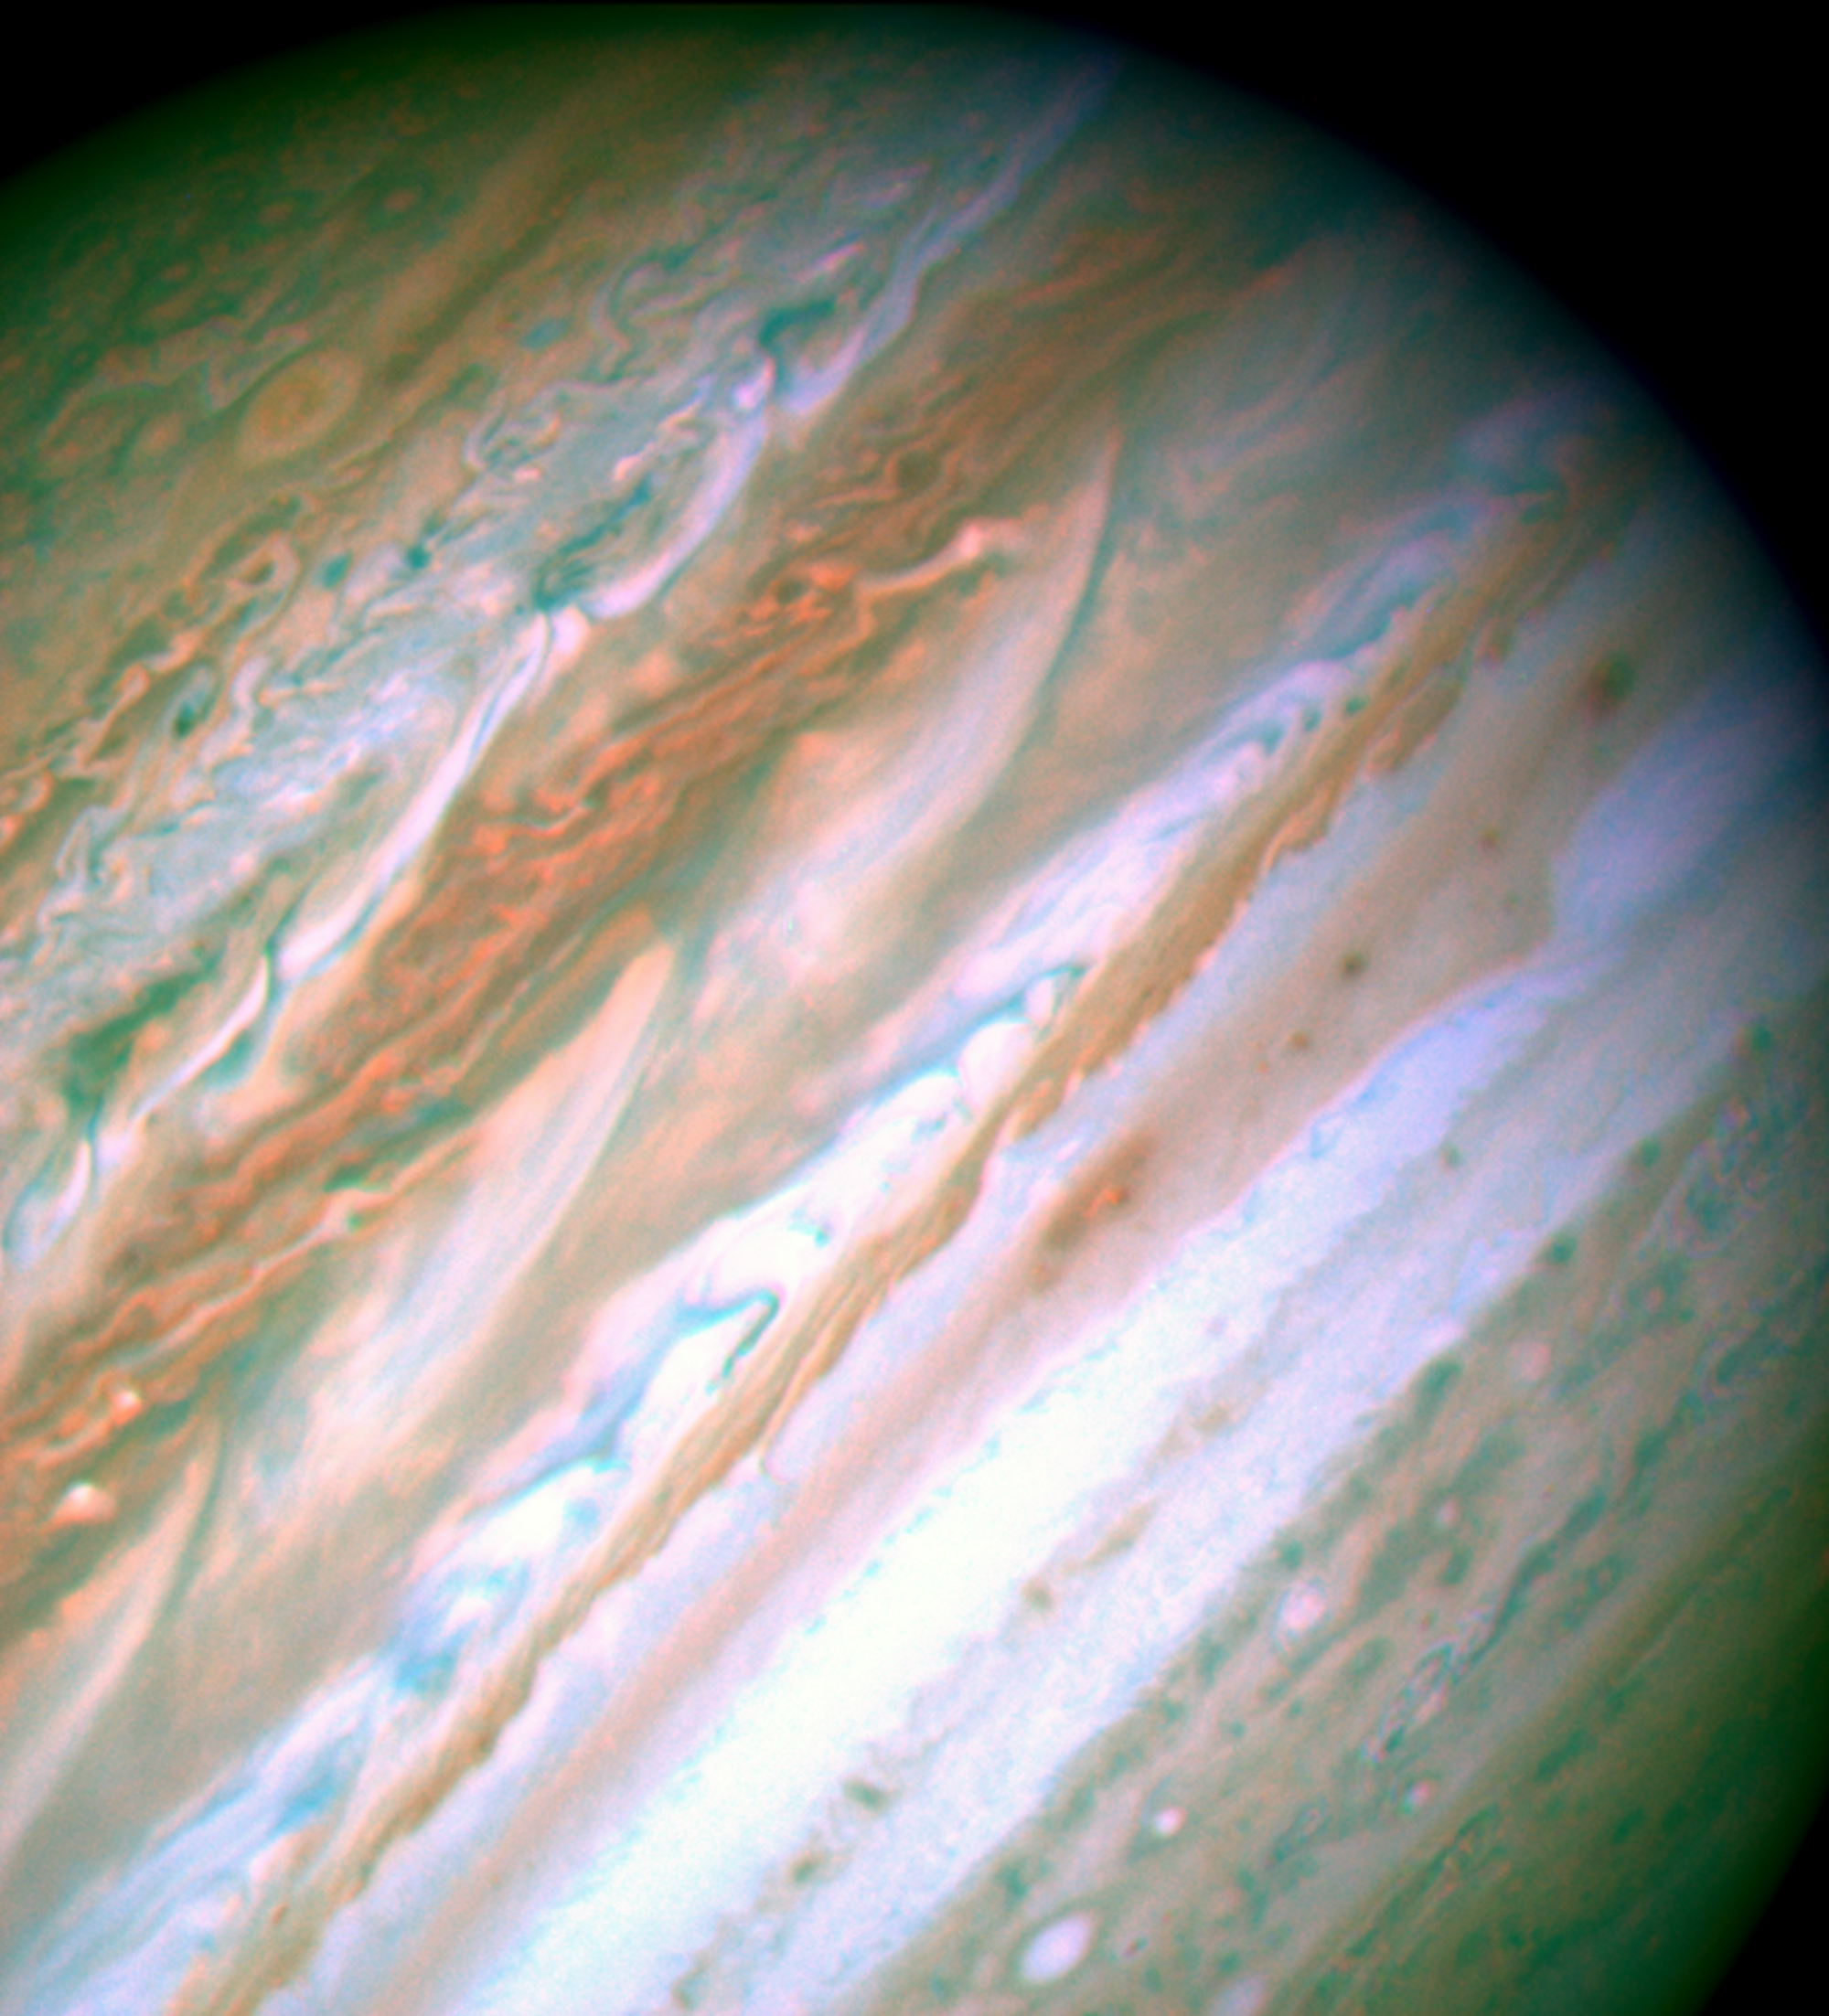

Visible-Light Image of Jupiter -- Hubble Space Telescope

An image of Jupiter in visible-light from NASA/ESA Hubble Space Telescope (HST) on May 11, 2007 showing the turbulent pattern generated by the two plumes at the upper left part of Jupiter.

Credit: NASA/ESA, IRTF, and A. Sÿnchez-Lavega and R. Hueso (Universidad del País Vasco, Spain)